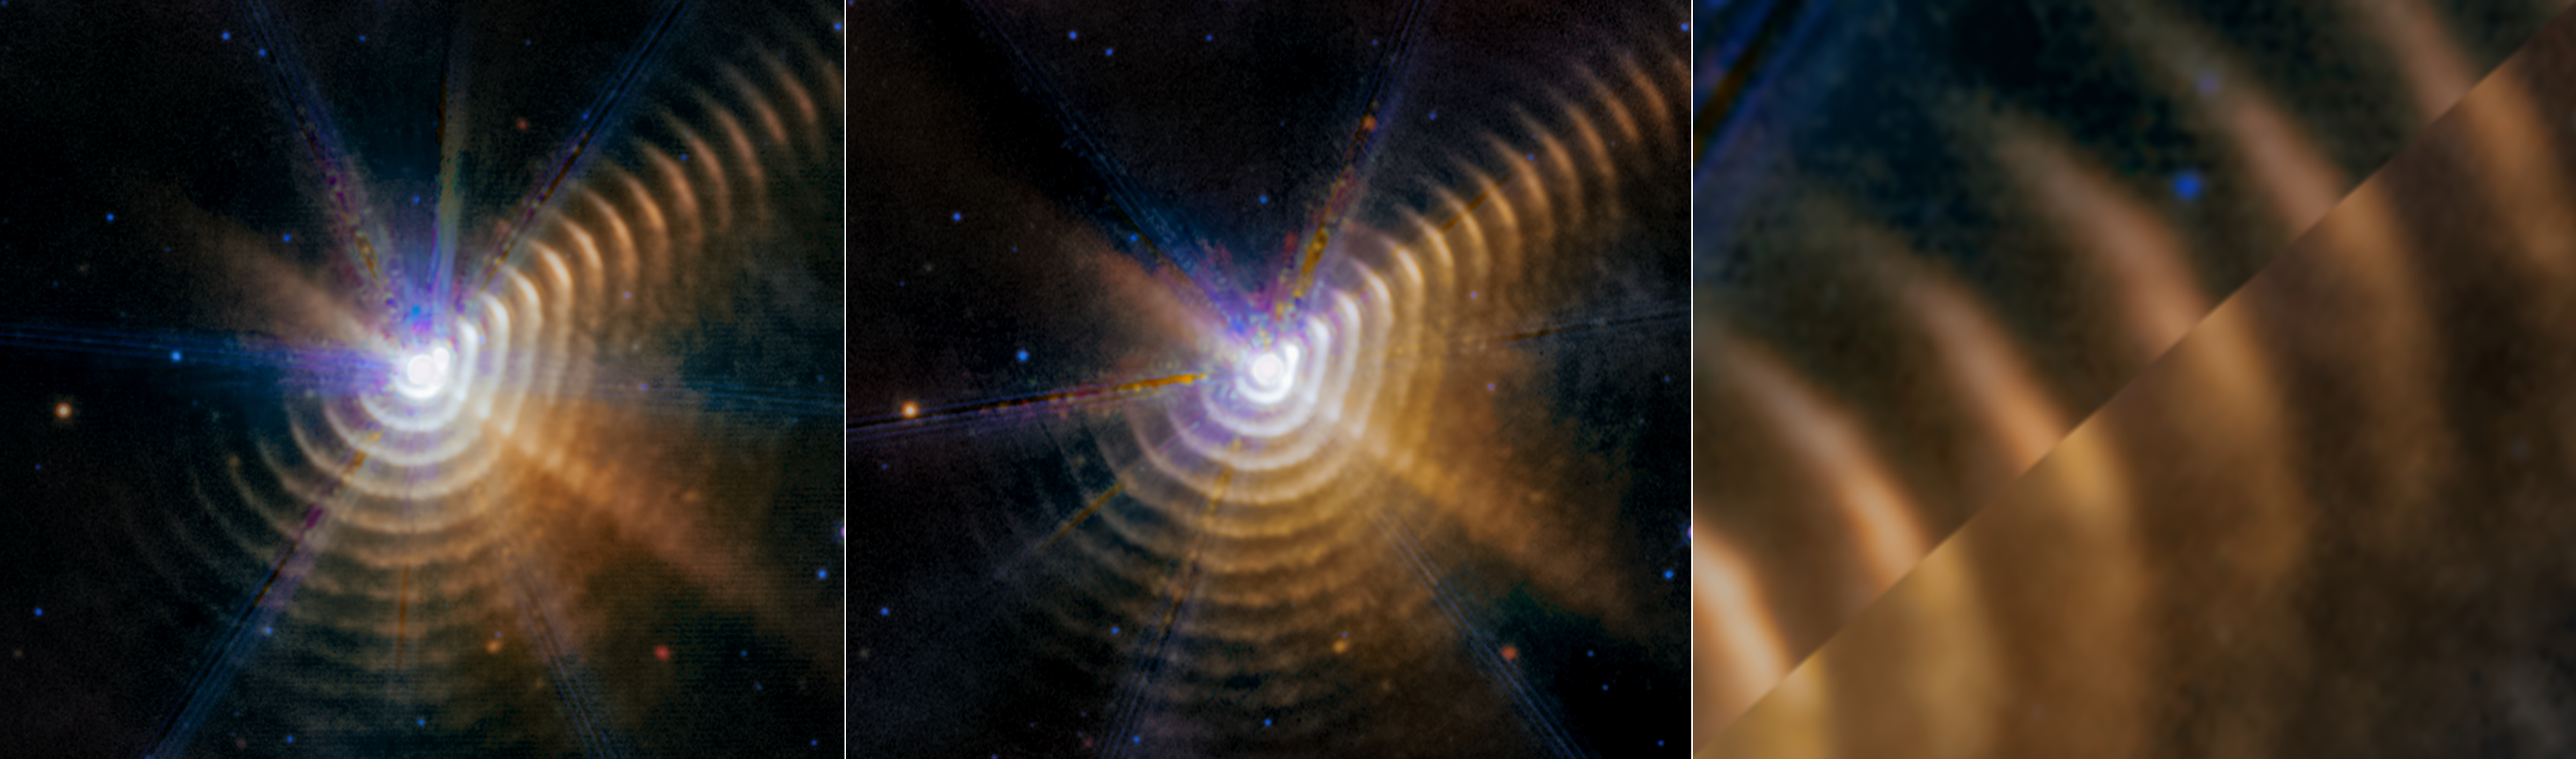

Observations of Wolf-Rayet 140 (MIRI Images, clean)

Compare the two mid-infrared images taken by the James Webb Space Telescope of Wolf-Rayet 140, a system of dust shells ejected by two massive stars that are in an elongated orbit.

Look to the top right of the first two images. Two triangles are matched up to show how much difference 14 months makes: the dust is racing away from the central stars at almost 1% the speed of light and no longer lines up in the third image.

When the winds of the massive stars, which are buried within the white central region in the first and second images, collide and that material compresses, it forms carbon-rich dust that moves away from the stars. This occurs for a few months during each eight-year orbit, which is one reason why the dust isn’t ‘sprayed’ equally around the stars to form complete shells.

Wolf-Rayet 140 lies just over 5000 light-years away in our Milky Way galaxy.

The left and center images show two observations of Wolf-Rayet 140, from July 2022 at left and from September 2023 at center.

Credit: NASA, ESA, CSA, STScI, E. Lieb (University of Denver), R. Lau (NSF NOIRLab), J. Hoffman (University of Denver)